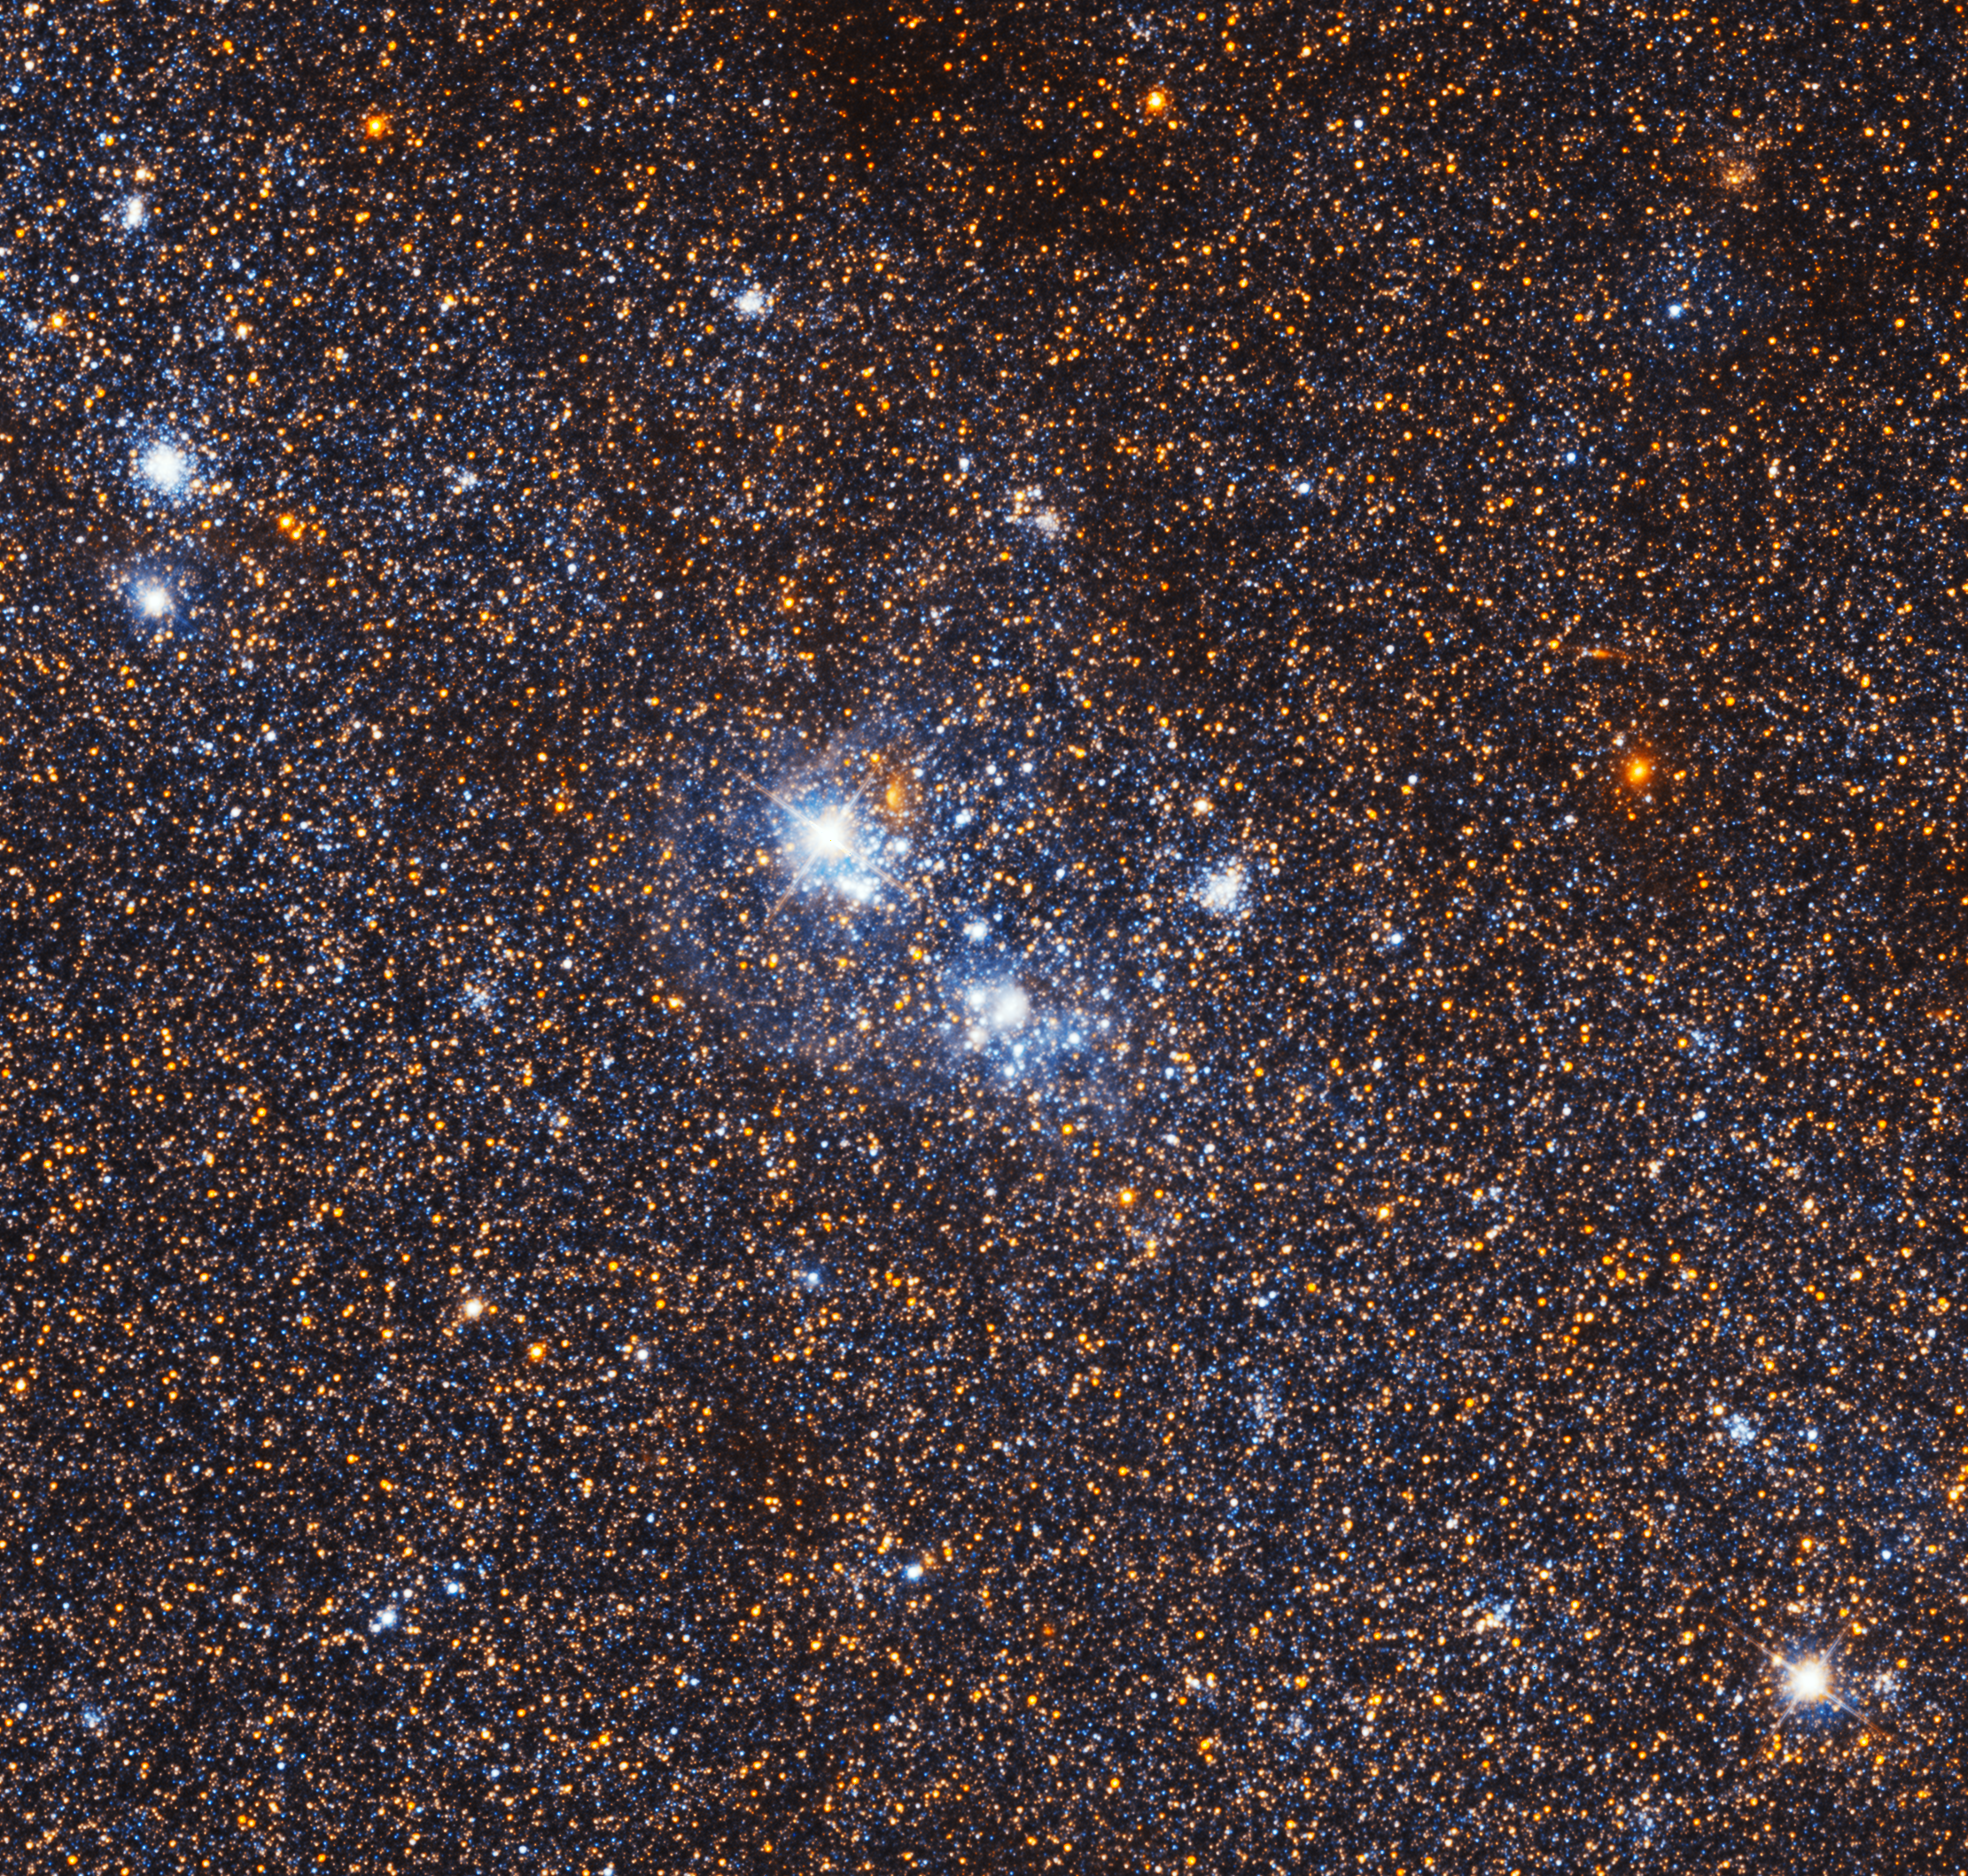

Stellar association IC 142

IC 142 is a region of ionised hydrogen and a large stellar association in the Triangulum Galaxy. A stellar association is a very loose cluster of stars that share a common origin, but have become gravitationally unbound and are slowly moving apart. Associations are primarily identified by their common movement vectors and ages.

The region IC 142 was discovered on 28 October 1889 by astronomer Guillaume Bigourdan.

This image is only a tiny part of the large wide-field image of the Triangulum Galaxy created by the NASA/ESA Hubble Space Telescope.

Credit: NASA, ESA, and M. Durbin, J. Dalcanton, and B. F. Williams (University of Washington)